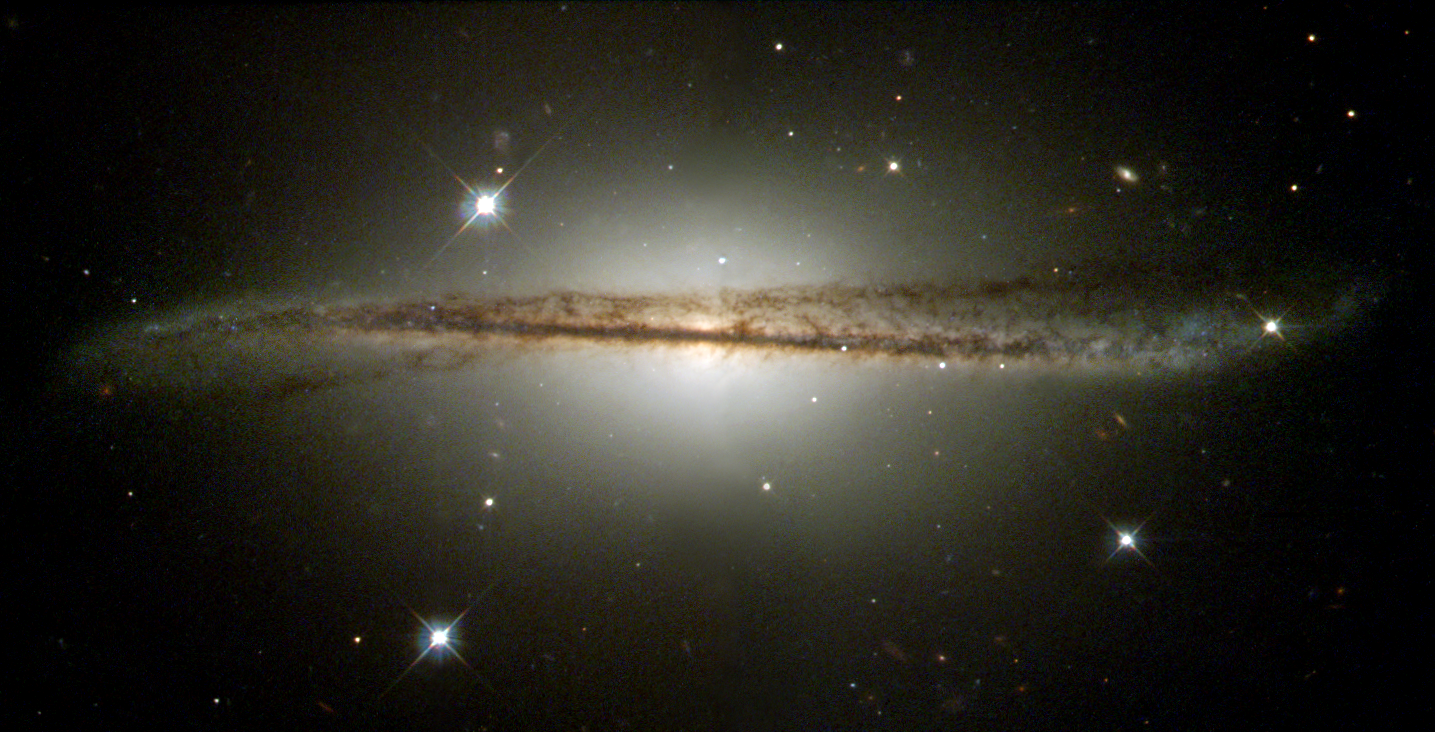

Galaxy playing twister

The Hubble telescope has captured an image of an unusual edge-on galaxy, revealing remarkable details of its warped dusty disk and showing how colliding galaxies spawn the formation of new generations of stars. The dust and spiral arms of normal spiral galaxies, like our own Milky Way, appear flat when viewed edge-on. This Hubble Heritage image of ESO 510-G13 shows a galaxy that, by contrast, has an unusual twisted disk structure, first seen in ground-based photographs.

Credit: NASA/ESA and The Hubble Heritage Team (STScI/AURA)